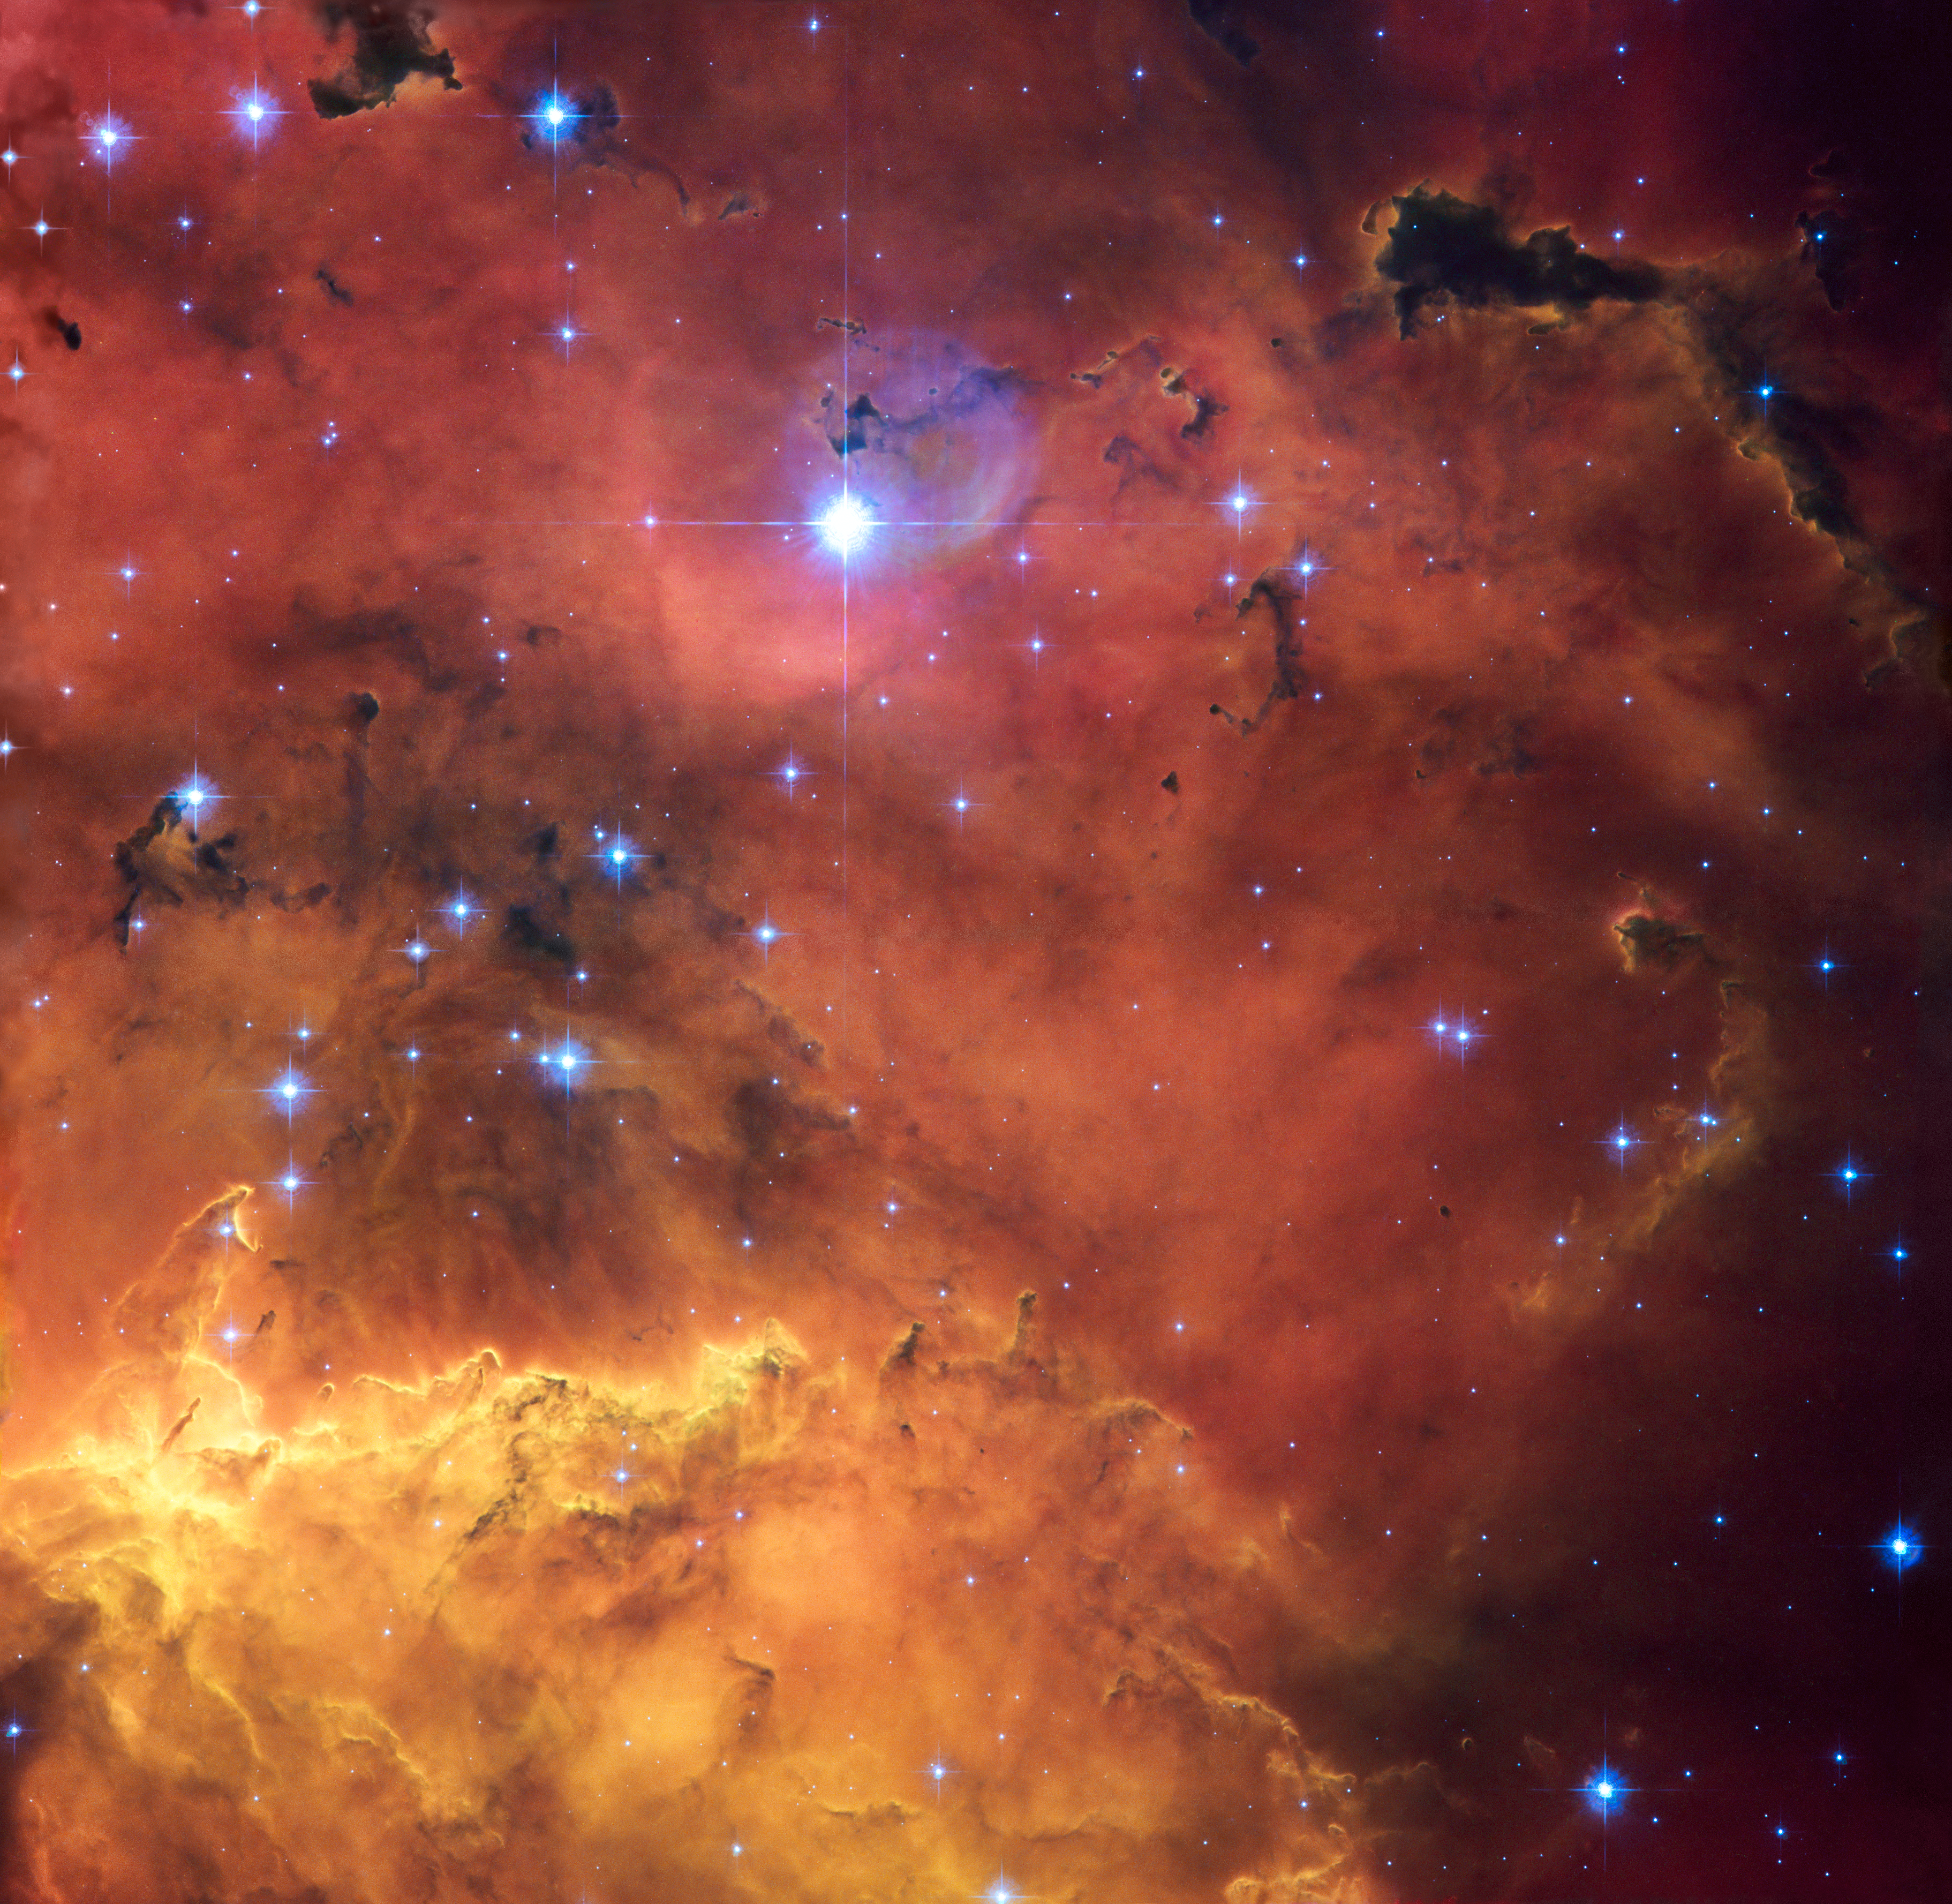

A cosmic concoction in NGC 2467

A colourful star-forming region is featured in this stunning new NASA/ESA Hubble Space Telescope image of NGC 2467. Looking like a roiling cauldron of some exotic cosmic brew, huge clouds of gas and dust are sprinkled with bright blue, hot young stars.

Strangely shaped dust clouds, resembling spilled liquids, are silhouetted against a colourful background of glowing. Like the familiar Orion Nebula, NGC 2467 is a huge cloud of gas — mostly hydrogen — that serves as an incubator for new stars.

This picture was created from images taken with the Wide Field Channel of the Advanced Camera for Surveys through three different filters (F550M, F660N and F658N, shown in blue, green and red). These filters were selected to let through different colours of red and yellow light arising from different elements in the gas. The total aggregate exposure time was about 2000 seconds and the field of view is about 3.5 arcminutes across. These data were taken in 2004.

Credit: NASA, ESA and Orsola De Marco (Macquarie University)